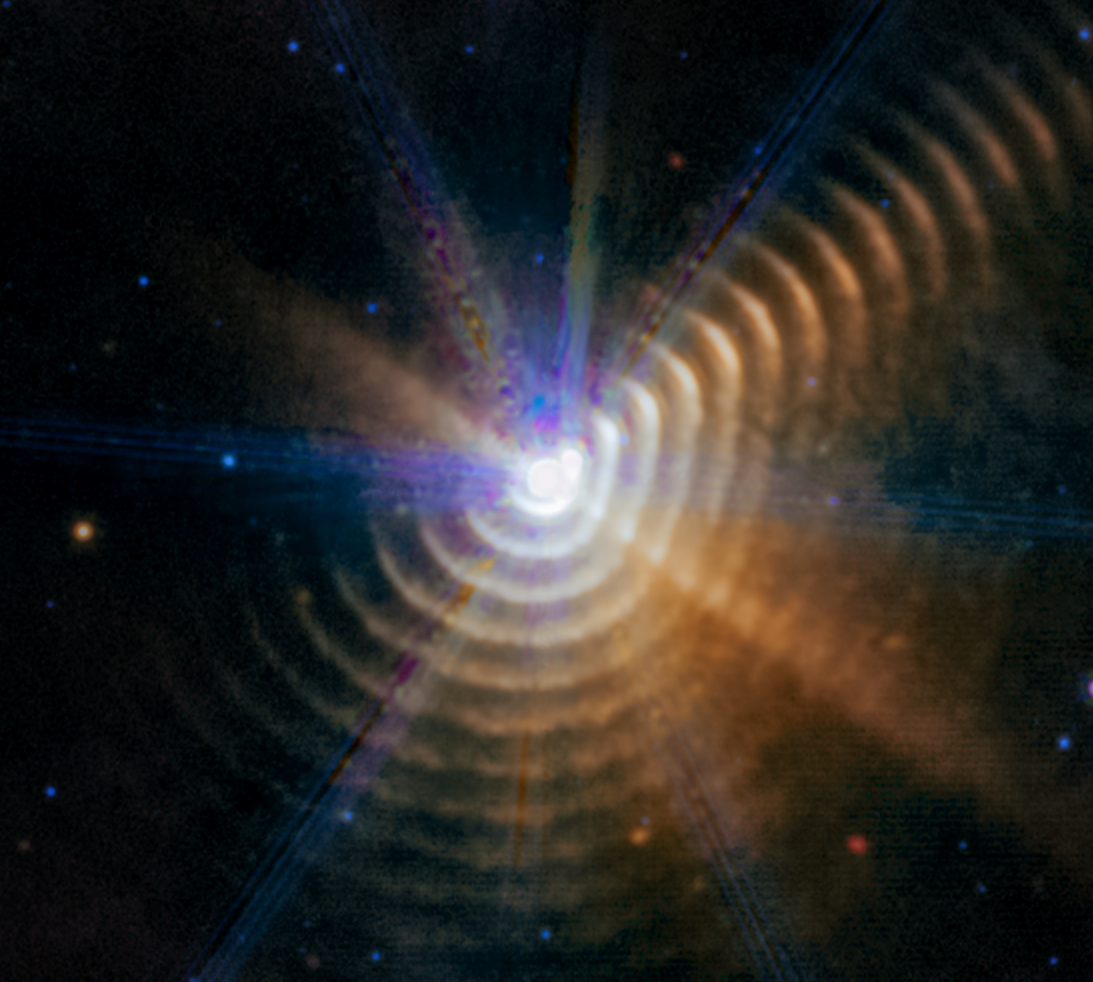

Wolf-Rayet 140 (MIRI image) - July 2022

Astronomers using the NASA/ESA/CSA James Webb Space Telescope James Webb Space Telescope have identified two stars responsible for generating carbon-rich dust a mere 5000 light-years away in our own Milky Way galaxy. As the massive stars in Wolf-Rayet 140 swing past one another on their elongated orbits, their winds collide and produce the carbon-rich dust. For a few months every eight years, the stars form a new shell of dust that expands outward — and may eventually go on to become part of stars that form elsewhere in our galaxy.

Every shell is racing away from the stars at more than 2600 kilometers per second, almost 1% the speed of light.

Wolf-Rayet 140 lies just over 5000 light-years away in our Milky Way galaxy.

Credit: NASA, ESA, CSA, STScI, E. Lieb (University of Denver), R. Lau (NSF NOIRLab), J. Hoffman (University of Denver)